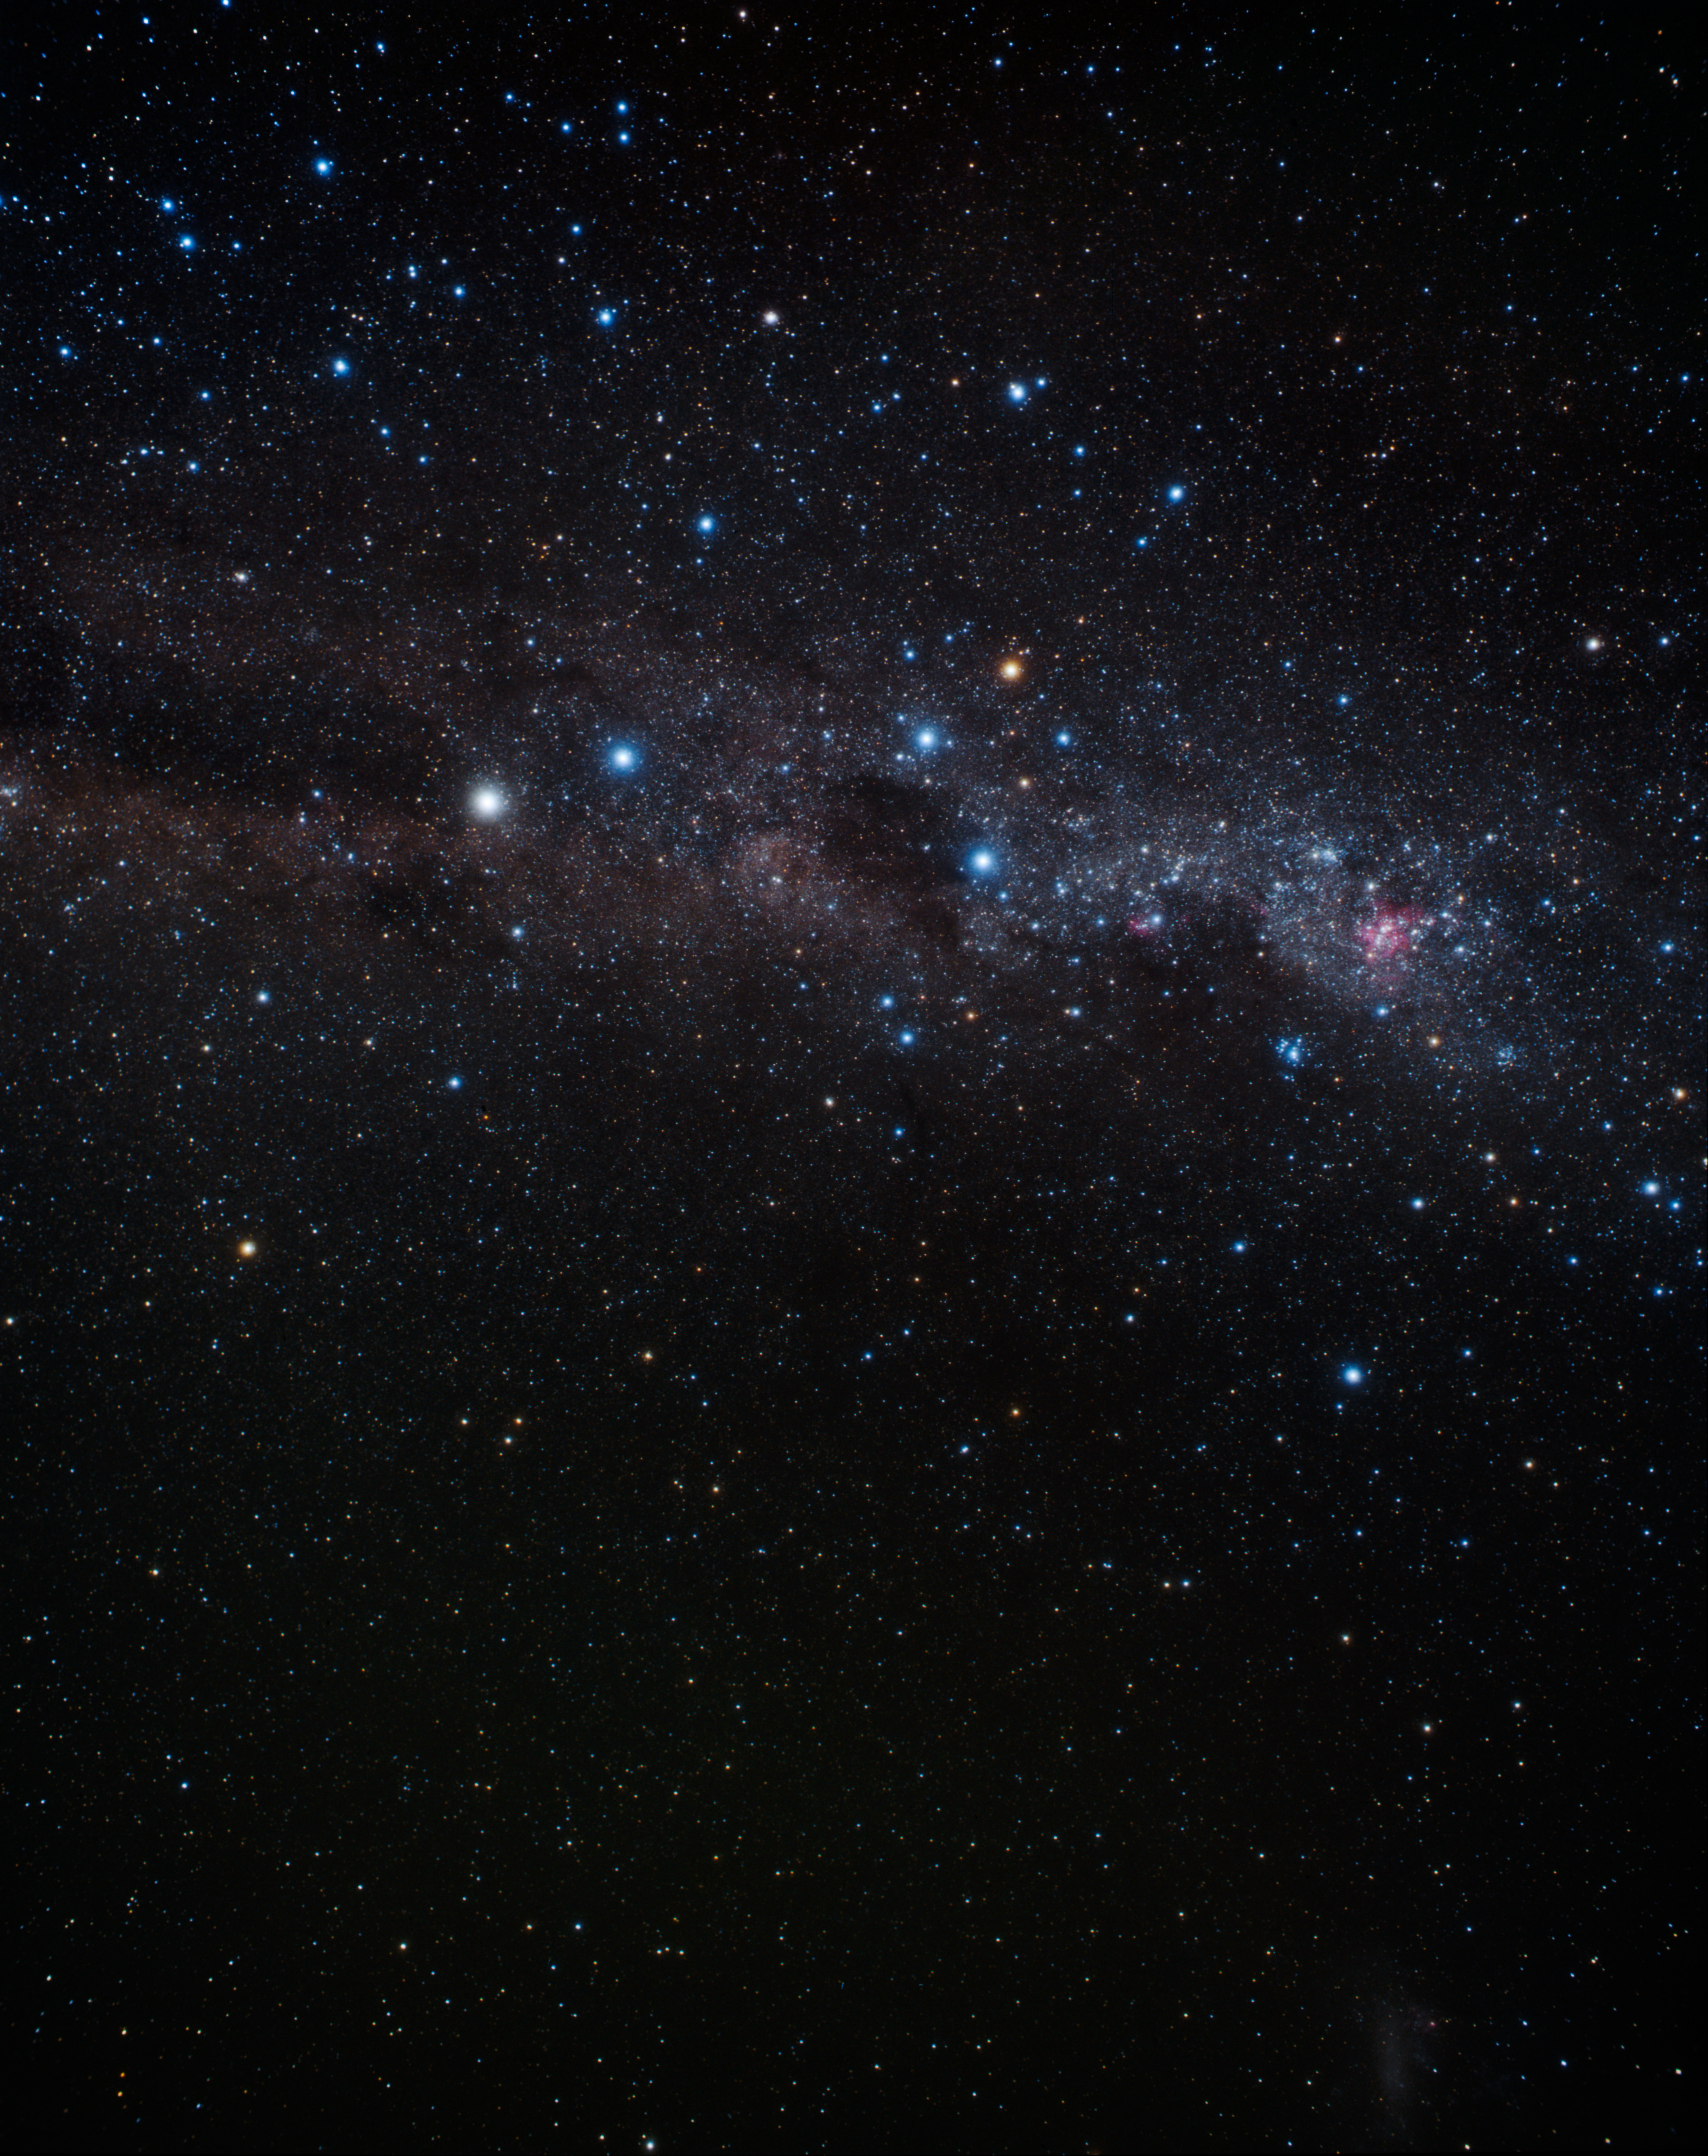

Wide-field image of the constellation Crux (ground-based image)

The Jewel Box is shown just right of centre, above the dark nebula called the Coal Sack in this picture of the southern sky. The picture was taken with a small ground-based camera.

Credit: A. Fujii